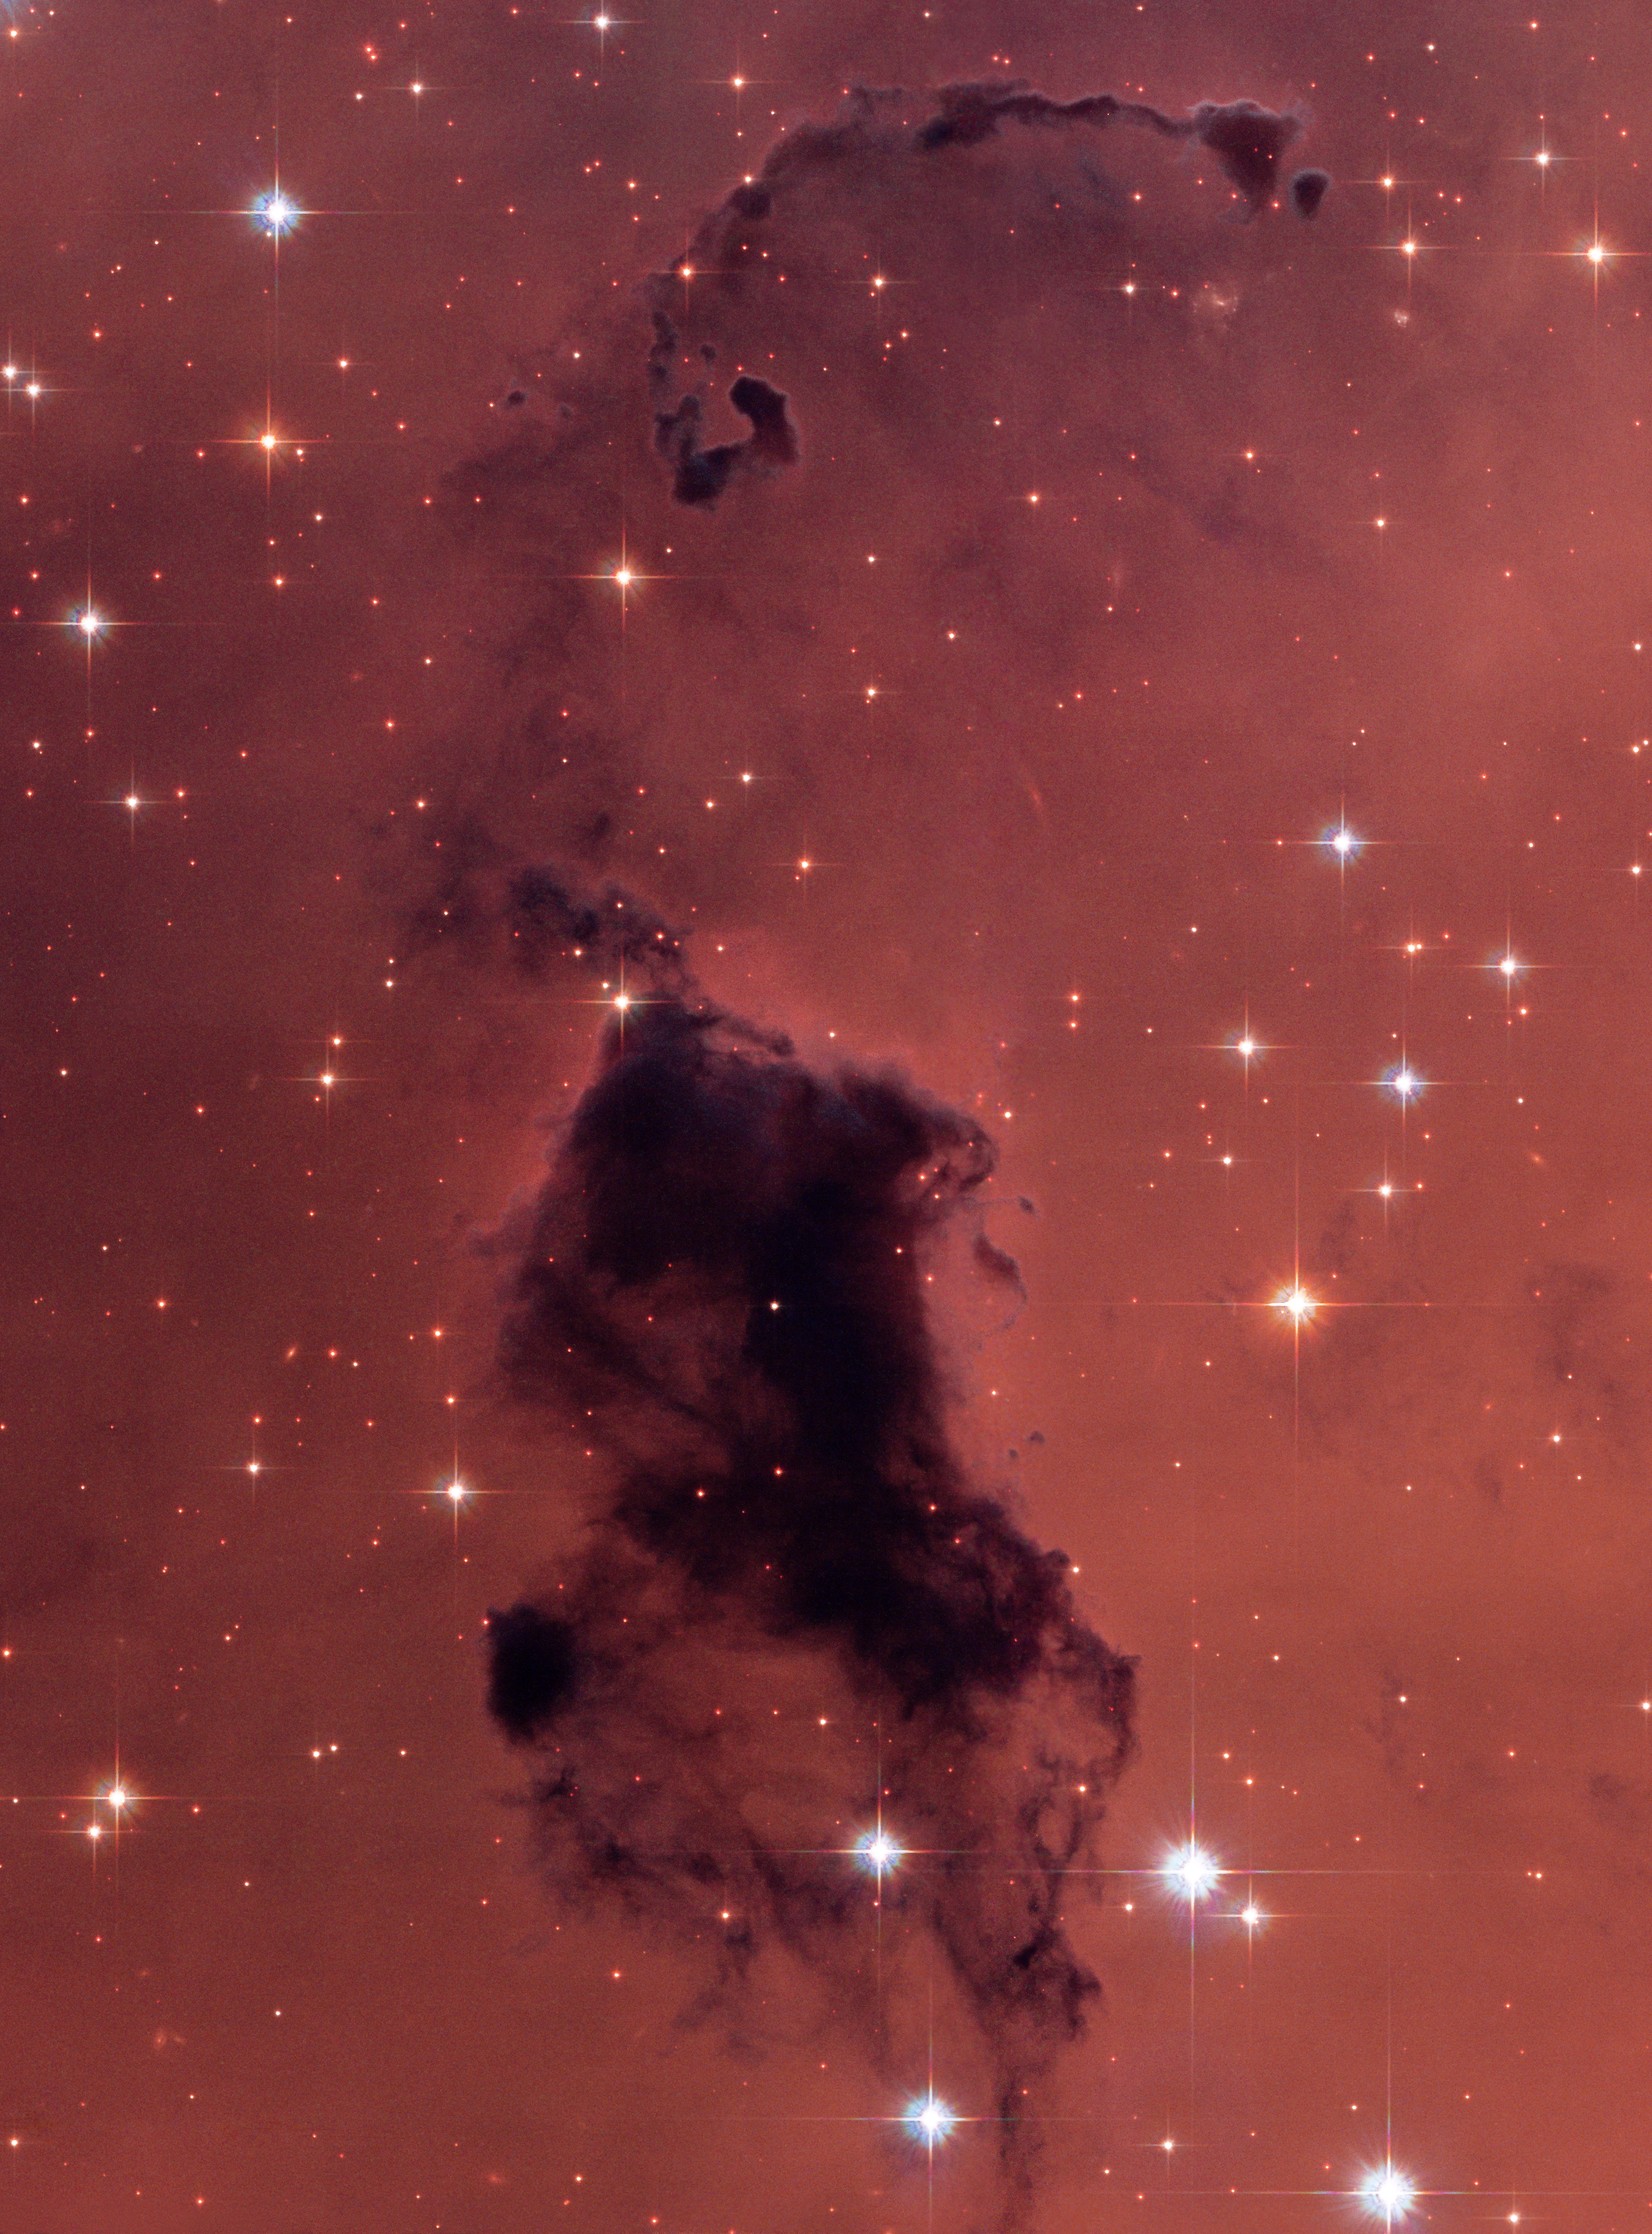

Nearby dust clouds in the Milky Way

The yearly ritual of spring cleaning clears a house of dust as well as dust "bunnies", those pesky dust balls that frolic under beds and behind furniture. NASA/ESA Hubble Space Telescope has photographed similar dense knots of dust and gas in our Milky Way Galaxy. This cosmic dust, however, is not a nuisance. It is a concentration of elements that are responsible for the formation of stars in our galaxy and throughout the universe.

These opaque, dark knots of gas and dust are called Bok globules, and they are absorbing light in the center of the nearby emission nebula and star-forming region, NGC 281. The globules are named after astronomer Bart Bok, who proposed their existence in the 1940's.

Credit: NASA, ESA, and The Hubble Heritage Team (STScI/AURA) Acknowledgment: P. McCullough (STScI)